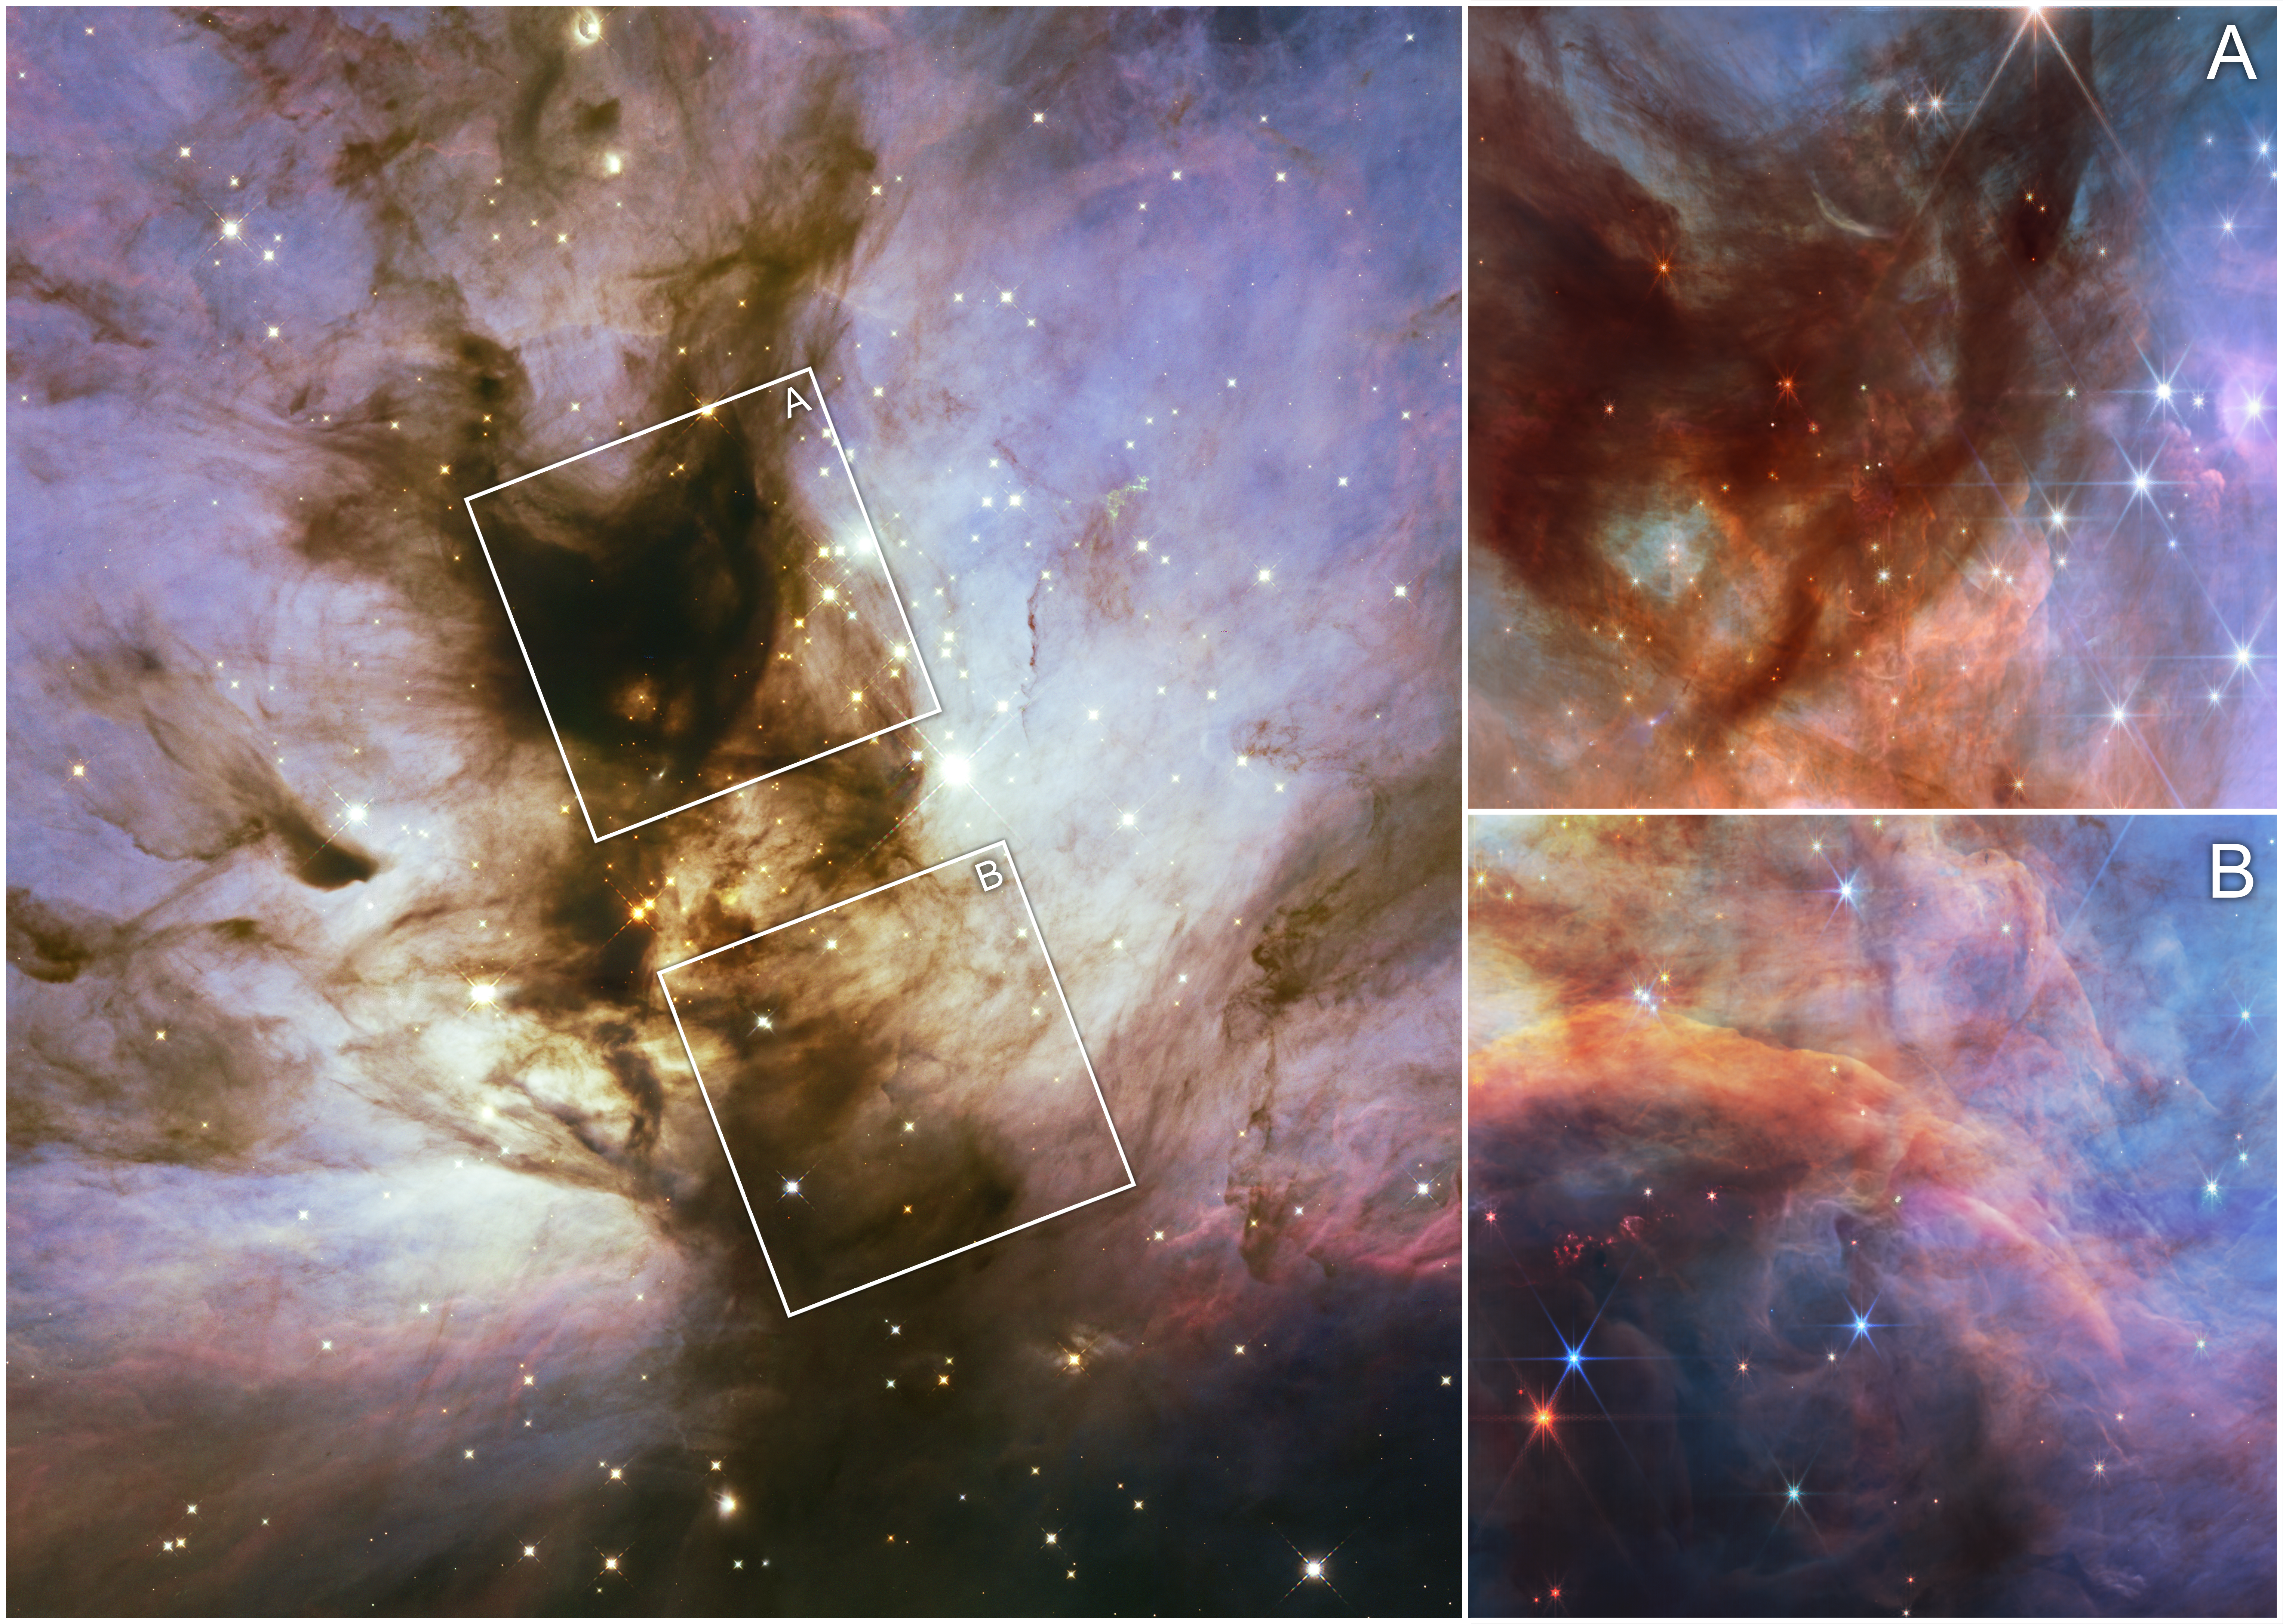

Flame Nebula in visible and infrared light

The Flame Nebula, located about 1,400 light-years away from Earth, is a hotbed of star formation less than 1 million years old. Within the Flame Nebula, there are objects so small that their cores will never be able to fuse hydrogen like full-fledged stars—brown dwarfs.

This collage of images from the Flame Nebula shows a visible light view from the NASA/ESA Hubble Space Telescope on the left, while the two insets at the right show the near-infrared view taken by the NASA/ESA/CSA James Webb Space Telescope. Much of the dark, dense gas and dust, as well as the surrounding white clouds within the visible light image, have been cleared in the near-infrared images, giving us a view into a more translucent cloud pierced by the infrared-producing objects within that are young stars and brown dwarfs. Astronomers used Webb to take a census of the lowest-mass objects within this star-forming region.

In this image, light at wavelengths of 1.15 microns and 1.4 microns (filters F115W and F140M) is represented in blue, 1.82 microns (F182M) as green, 3.6 microns (F360M) as orange, and 4.3 microns (F430M) as red.

Credit: NASA, ESA, CSA, M. Meyer (University of Michigan), A. Pagan (STScI)